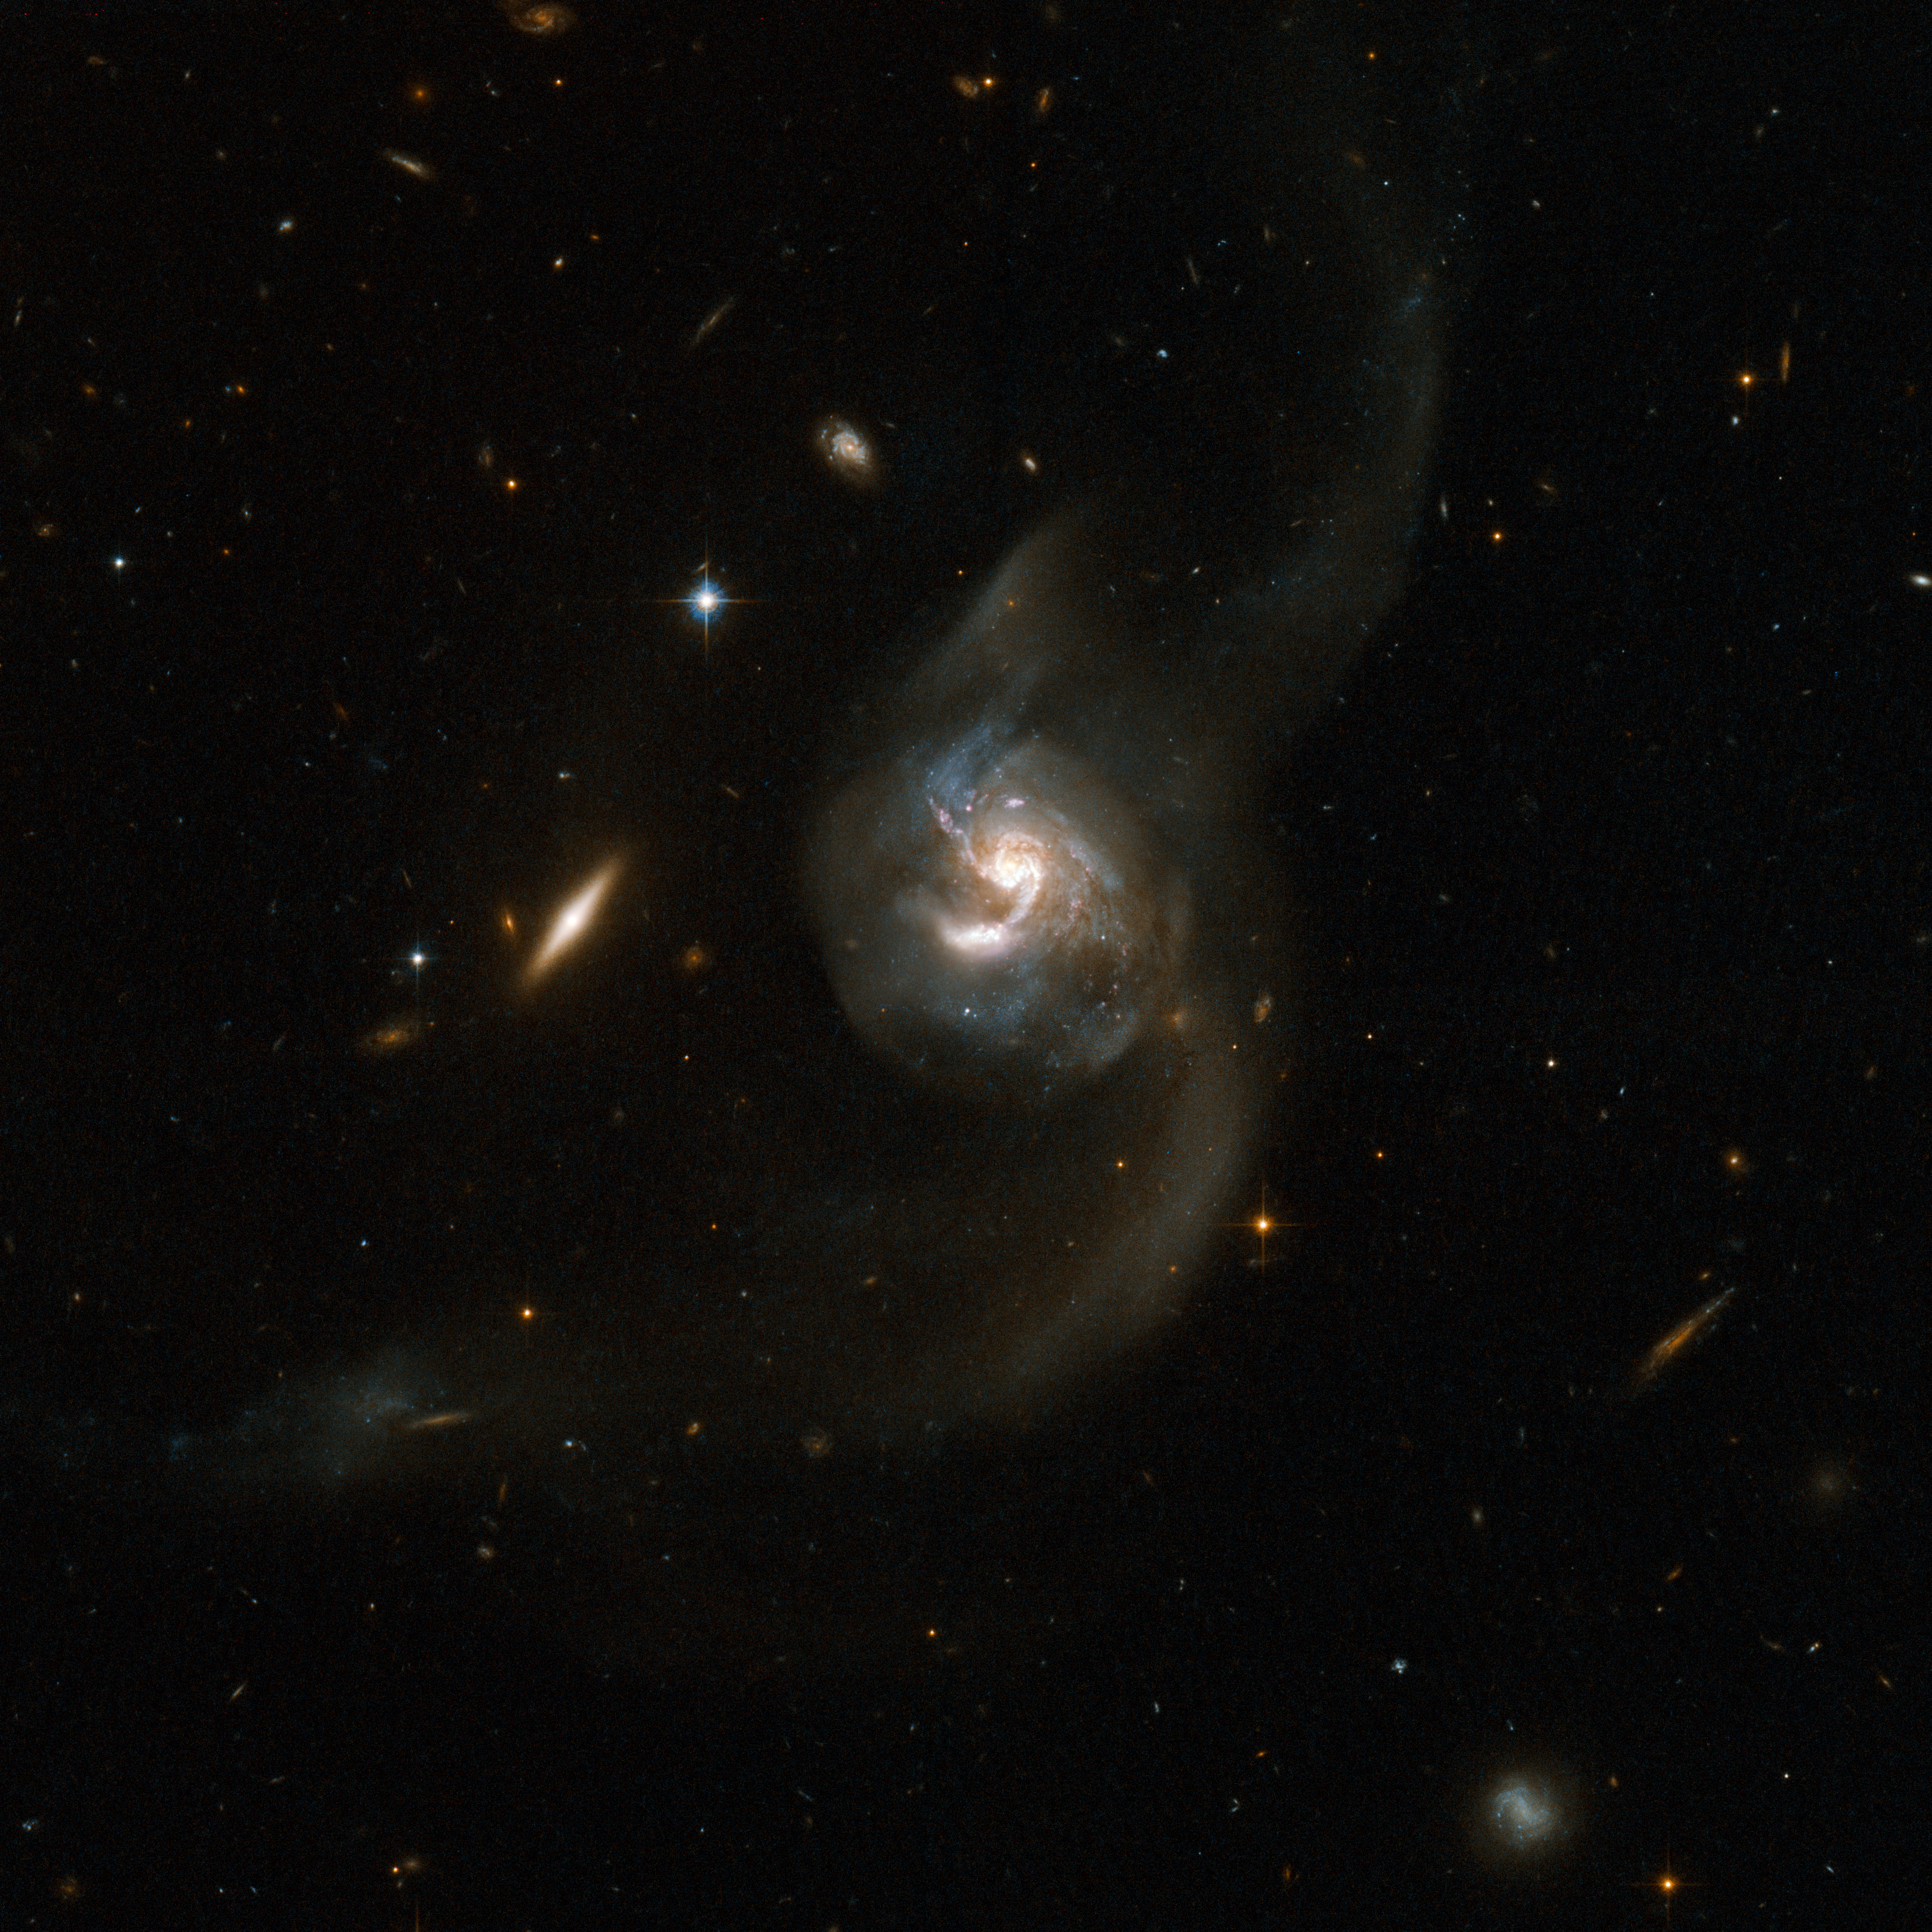

NGC 6090

NGC 6090 is a beautiful pair of spiral galaxies with an overlapping central region and two long tidal tails formed from material ripped out of the galaxies by gravitational interaction. The two visible cores are approximately 10,000 light-years apart, suggesting that the two galaxies are at an intermediate stage in the merging process. The Hubble image reveals bright knots of newborn stars in the region where the two galaxies overlap. The upper component has a clear spiral structure viewed face-on while the component just below is seen edge-on with no spiral arms visible . NGC 6090 is located in the constellation of Draco, the Dragon, about 400 million light-years away from Earth. A number of fainter, and more distant, background galaxies is seen in the image. This system has much in common with the famous Antennae galaxies both in terms of how far the merger has progressed and in our viewing angle.

This image is part of a large collection of 59 images of merging galaxies taken by the Hubble Space Telescope and released on the occasion of its 18th anniversary on 24th April 2008.

Credit: NASA, ESA, the Hubble Heritage Team (STScI/AURA)-ESA/Hubble Collaboration and A. Evans (University of Virginia, Charlottesville/NRAO/Stony Brook University) and G. Ostlin (Stockholm University)